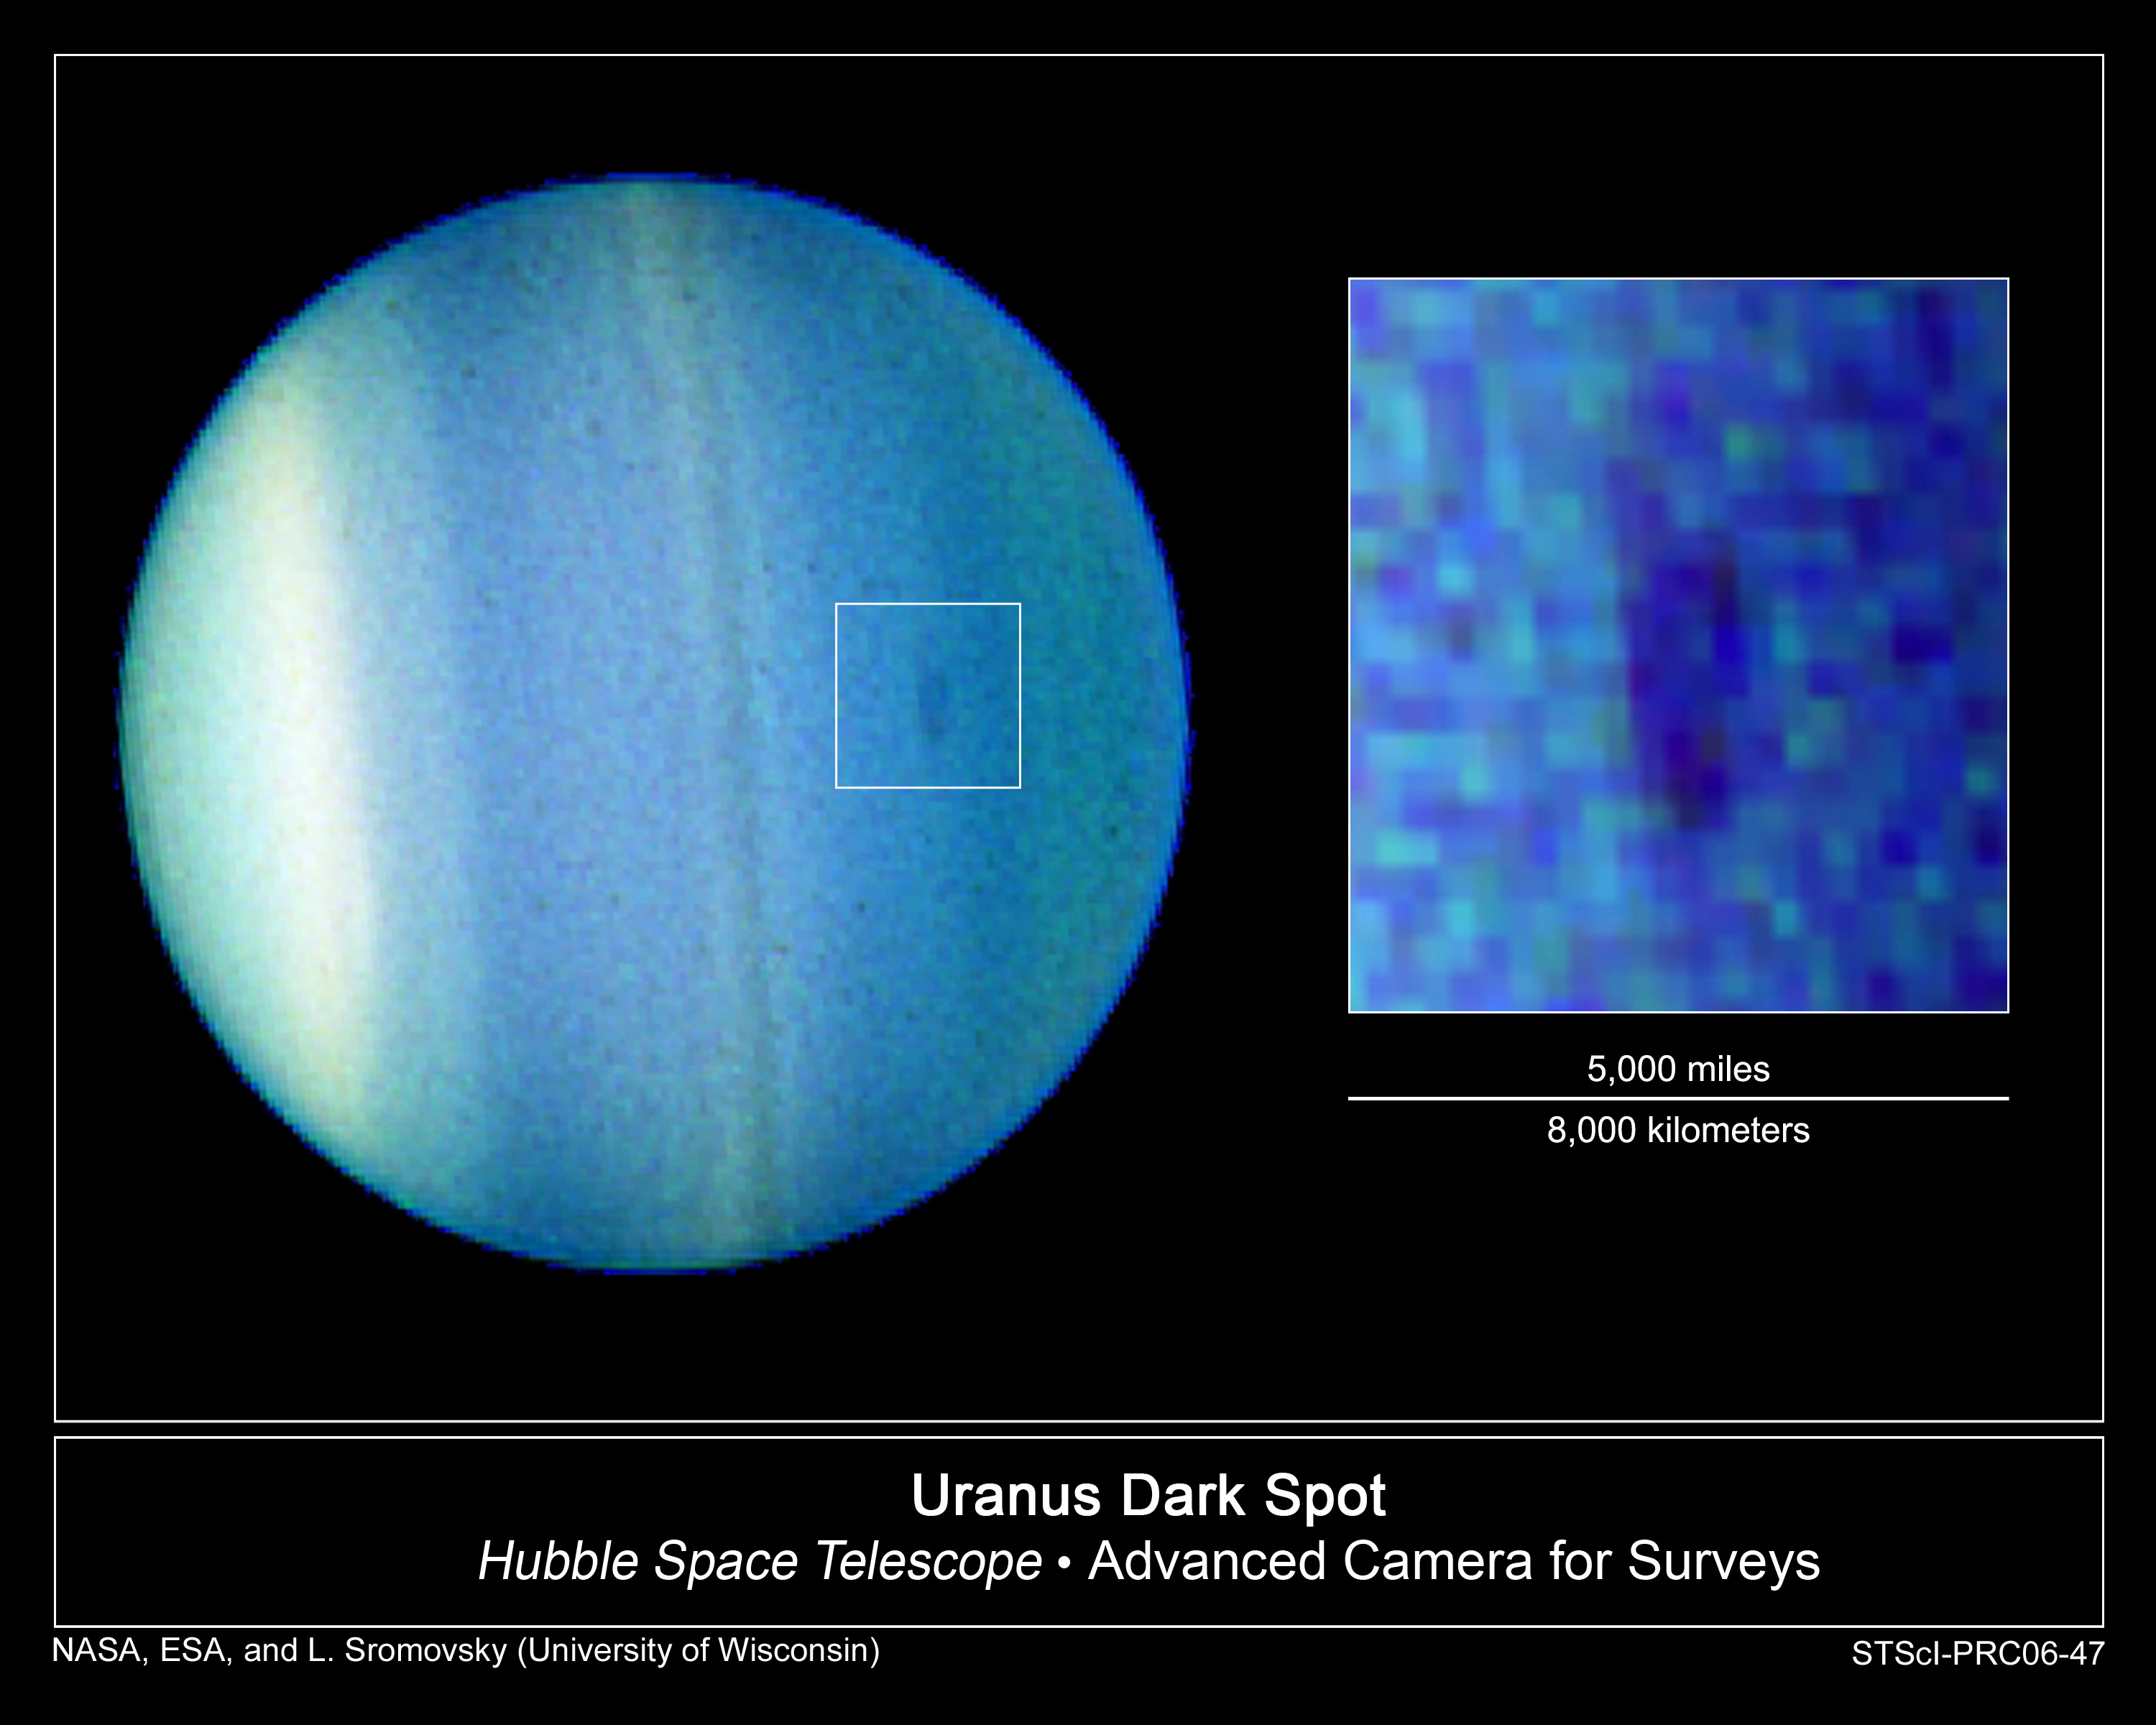

Hubble Discovers Dark Cloud in the Atmosphere of Uranus

Just as we near the end of the hurricane season in the Atlantic Ocean, winds whirl and clouds churn 2 billion miles away in the atmosphere of Uranus, forming a dark vortex large enough to engulf two-thirds of the United States.

Lawrence Sromovsky of the University of Wisconsin-Madison leads a team that used NASA/ESA Hubble Space Telescope to take the first definitive images of a dark spot on Uranus. The elongated feature measures 1,100 miles by 1,900 miles (1,700 kilometers by 3,000 kilometers).

There have been prior unconfirmed sightings of dark spots on Uranus, including sketches made in the early 1900s, low-contrast ultraviolet Voyager spacecraft flyby images in 1986, and near-infrared observations taken from a ground-based observatory in 1993. However, no other Hubble images taken almost every summer from 1994 through early 2006 have shown such a dark spot. This indicates that the current dark disturbance probably formed very recently, researchers said.

Although rare on Uranus, dark spots have been frequently observed on Neptune. Uranus is similar in size and atmospheric composition to Neptune, but it has not appeared to have as active an atmosphere. Recently, however, Uranus's atmosphere has shown an increase in activity.

The development of a dark spot may be a signal of the oncoming uranian northern spring, said researchers. Uranus is approaching its December 2007 equinox, when the Sun will shine directly over the equator. "We have hypothesized that Uranus might become more Neptune-like as it approached its equinox," said team member Heidi B. Hammel of the Space Science Institute in Boulder, Colo. "The sudden appearance of this unusual dark feature suggests we might be right."

The dark spot was detected at a latitude of 27 degrees in Uranus's northern hemisphere, which is just now becoming fully exposed to sunlight after many years of being in shadow. Astronomers are keenly interested in how strongly and quickly the atmosphere of Uranus seems to be responding to seasonal sunlight changes.

Uranus's rotation axis is tilted almost parallel to its orbital plane, such that the planet appears to be rotating on its side. This sideways orientation leads to extreme seasons during the planet's 84-year path around the Sun.

This three-wavelength composite image was taken with Hubble's Advanced Camera for Surveys on August 23, 2006. The research team found the dark spot again on August 24. The inset image shows a magnified view of the spot with enhanced contrast. Uranus's north pole is near the 3 o'clock position in this image. The bright band in the southern hemisphere is at 45 degrees south.

Credit: NASA, ESA, L. Sromovsky and P. Fry (University of Wisconsin), H. Hammel (Space Science Institute), and K. Rages (SETI Institute)